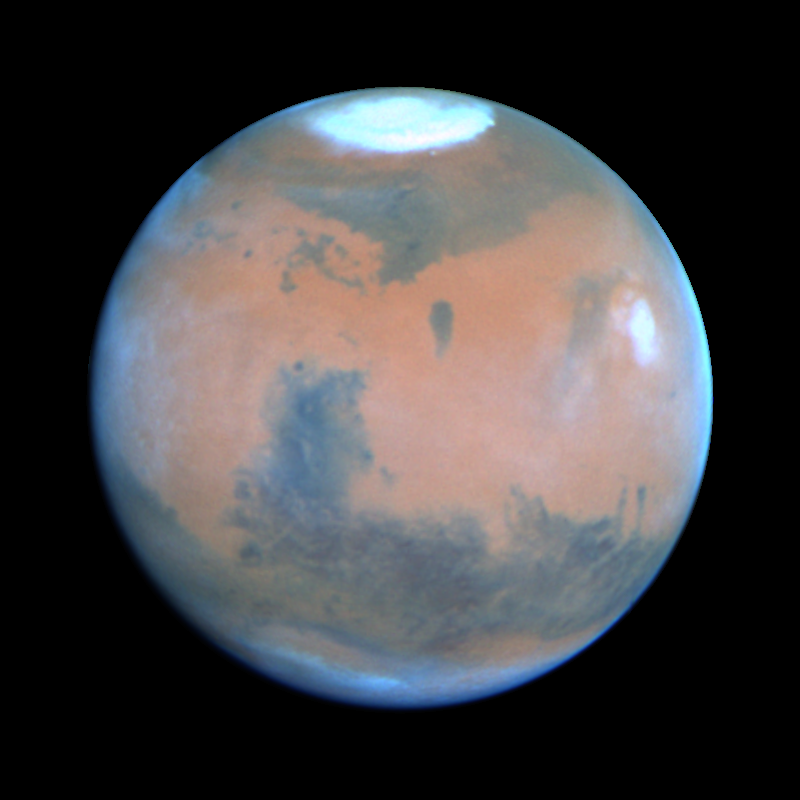

Mars at Opposition 1995 (Syrtis Major Region)

This Hubble Space Telescope view of the planet Mars is the clearest picture ever taken from Earth, surpassed only by close-up shots sent back by visiting space probes. The picture was taken on February 25, 1995, when Mars was at a distance of approximately 65 million miles (103 million km) from Earth.

Credit: Philip James (University of Toledo), Steven Lee (University of Colorado), NASA/ESA